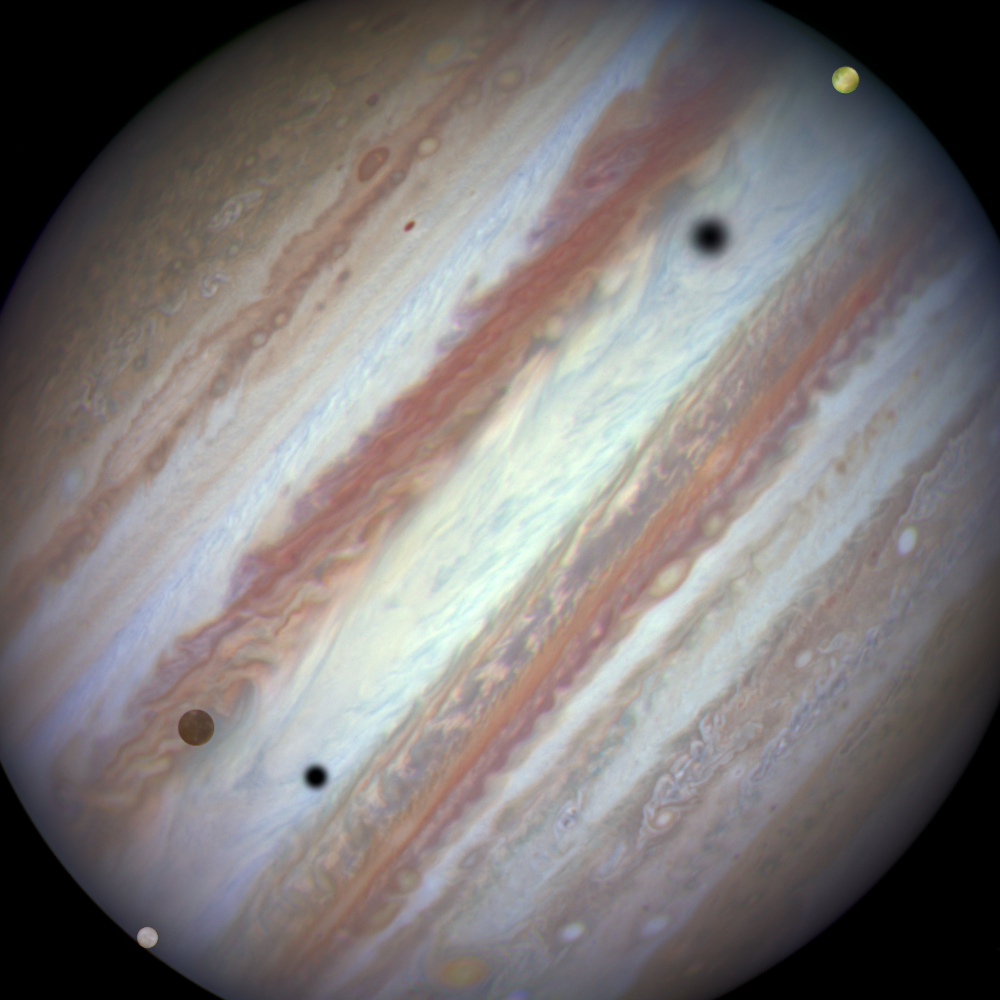

Three moons and their shadows parade across Jupiter — end of event

This new NASA/ESA Hubble Space Telescope image captures a rare occurrence as three of Jupiter’s largest moons parade across the giant gas planet’s banded face.

The image shows the end of the event. Europa has entered the frame at lower left with slower-moving Callisto above and to the right of it. Meanwhile Io — which orbits significantly closer to Jupiter — is approaching the eastern limb of the planet.

The movement of the moons is shown in the video created from Hubble stills and an annotated version is also available.

Credit: NASA, ESA, Hubble Heritage Team